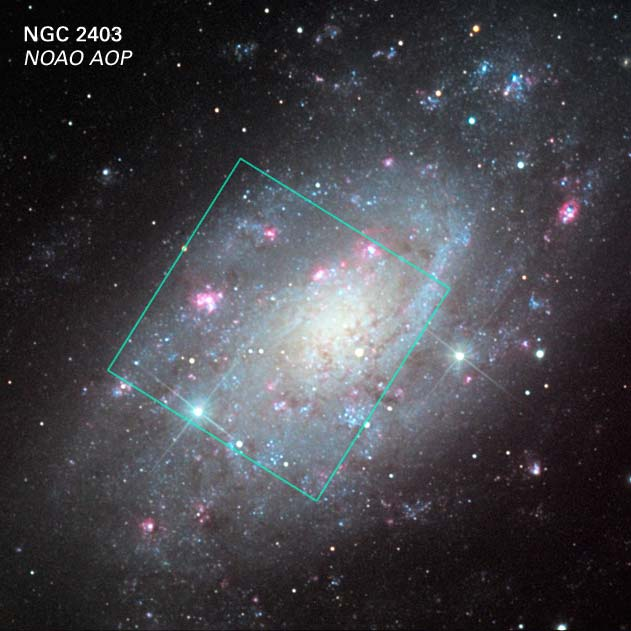

NGC 2403: Ground-based and Hubble View

This composite image shows a ground-based image of NGC 2403 and the location of a 10,000 light-year-wide square region imaged with the Hubble Space Telescope's Advanced Camera for Surveys. The area is host to Supernova 2004dj, the closest explosion of a massive star in over a decade, which blazes with the light of 200 million Suns.

Credit: NOAO/AURA/NSF, C. Olson, J. Lapre and A. Block (NOAO)